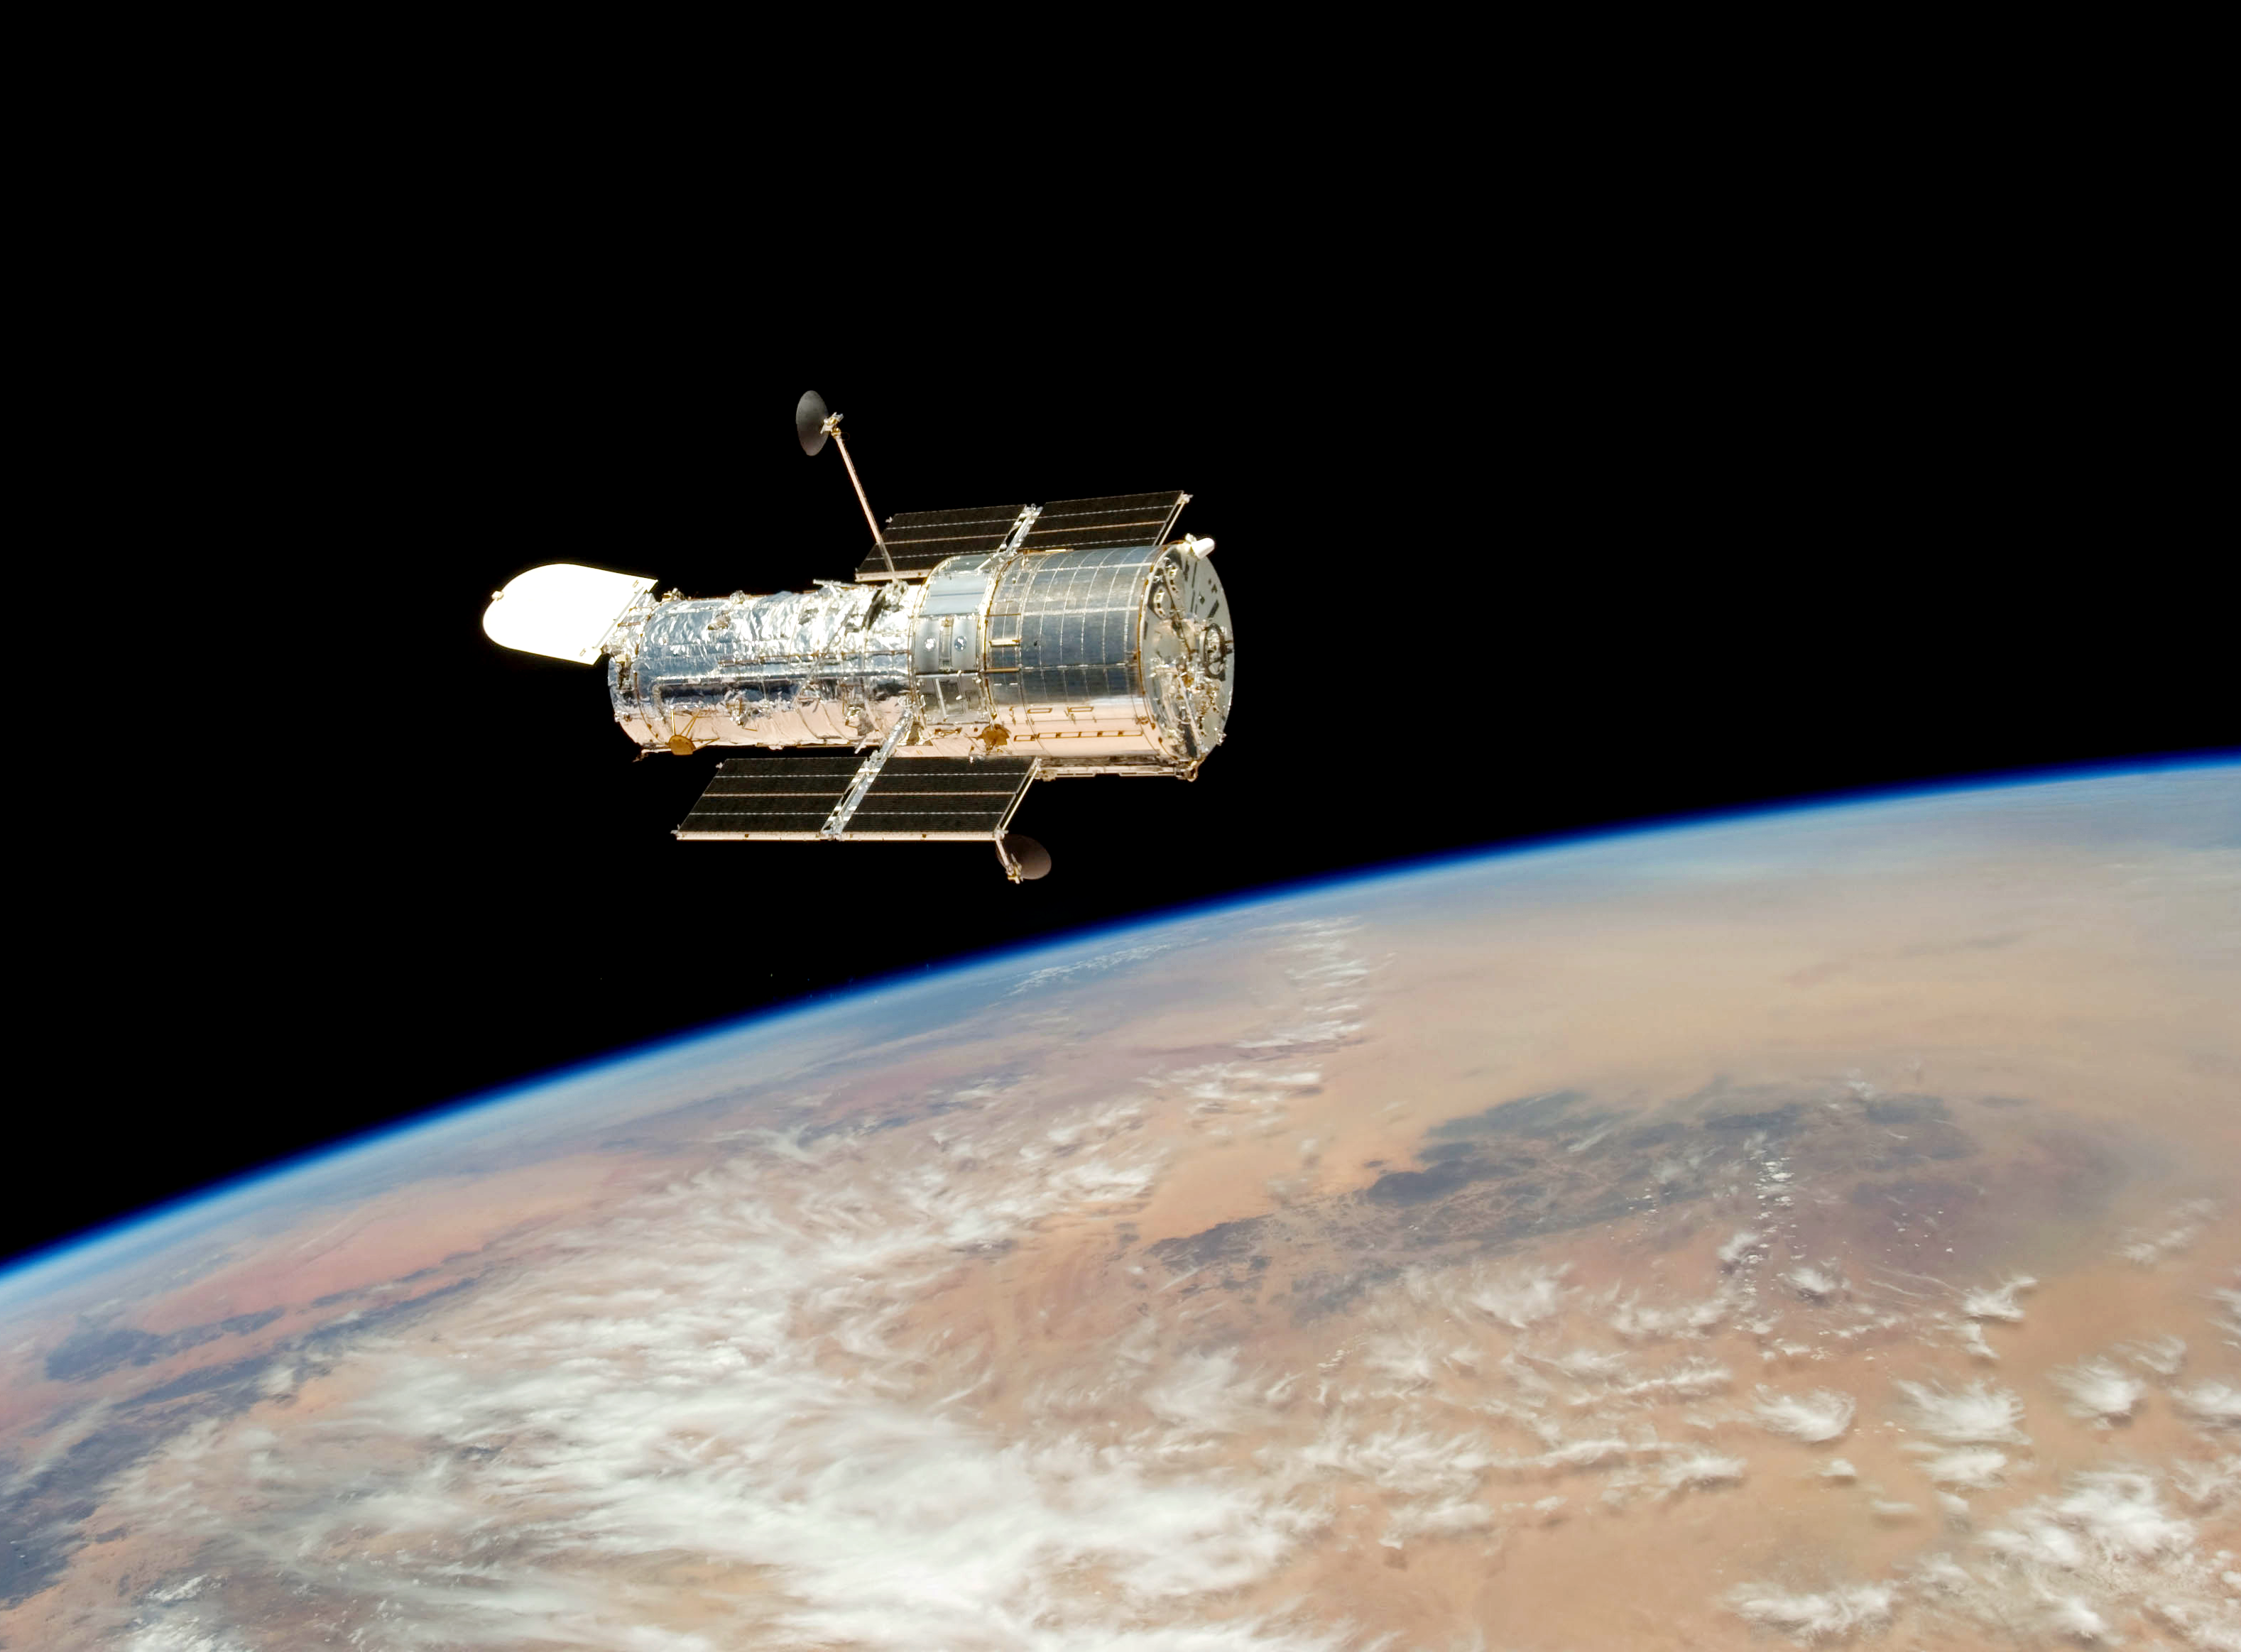

Final release over Earth (2009)

Hubble drifts over Earth after its release on 19 May 2009 by the crew of the Space Shuttle Atlantis. The crew had performed all planned tasks over the course of five spacewalks, making the Servicing Mission 4, the fifth astronaut visit to the Hubble Space Telescope, an unqualified success.

Credit: NASA/ESA